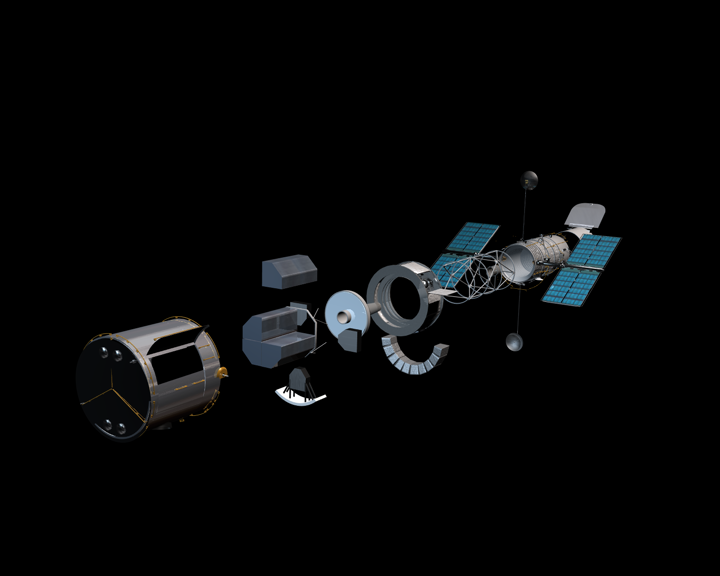

Hubble exploded view

Hubble Exploded View

Credit: NASA, ESA